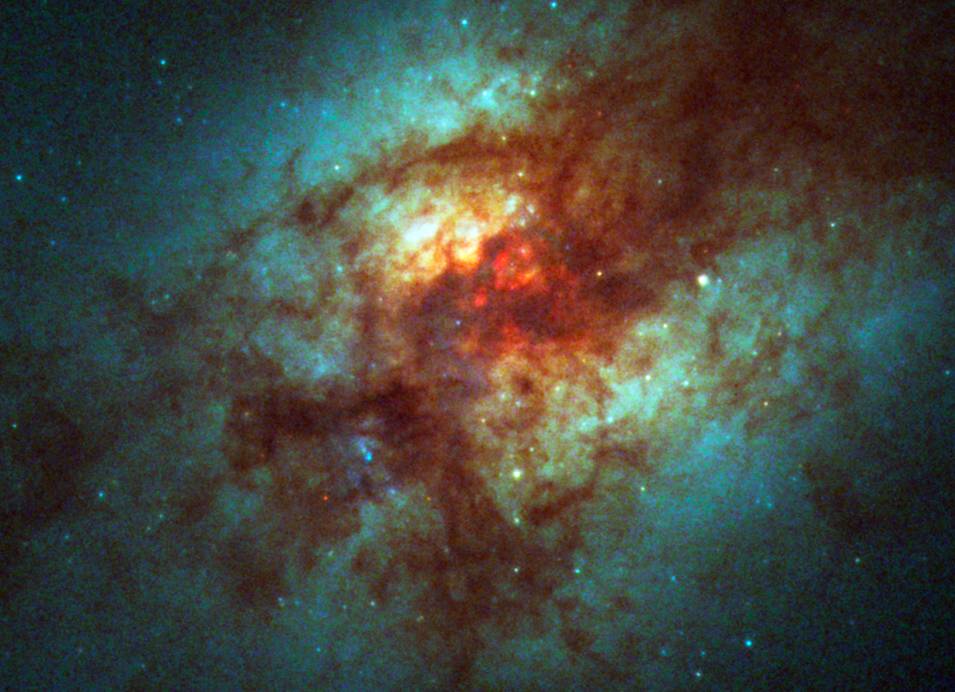

Super Star Clusters in Dust-Enshrouded Galaxy

The sharp eye of the Hubble Space Telescope's Advanced Camera for Surveys has uncovered more than 200 mammoth star clusters in the heart of the galaxy Arp 220.

The clusters are the bluish-white dots scattered throughout the image. The heftiest Arp 220 cluster - about 10 million solar masses - is twice as massive as any comparable star cluster in the Milky Way Galaxy. Arp 220 collided with another galaxy about 700 million years ago, fueling the frenzy of star birth in a small region about 5,000 light-years across. The galaxy is a nearby example of the aftermath of two colliding galaxies.

Credit: NASA, ESA, and The Hubble Heritage Team (STScI/AURA)